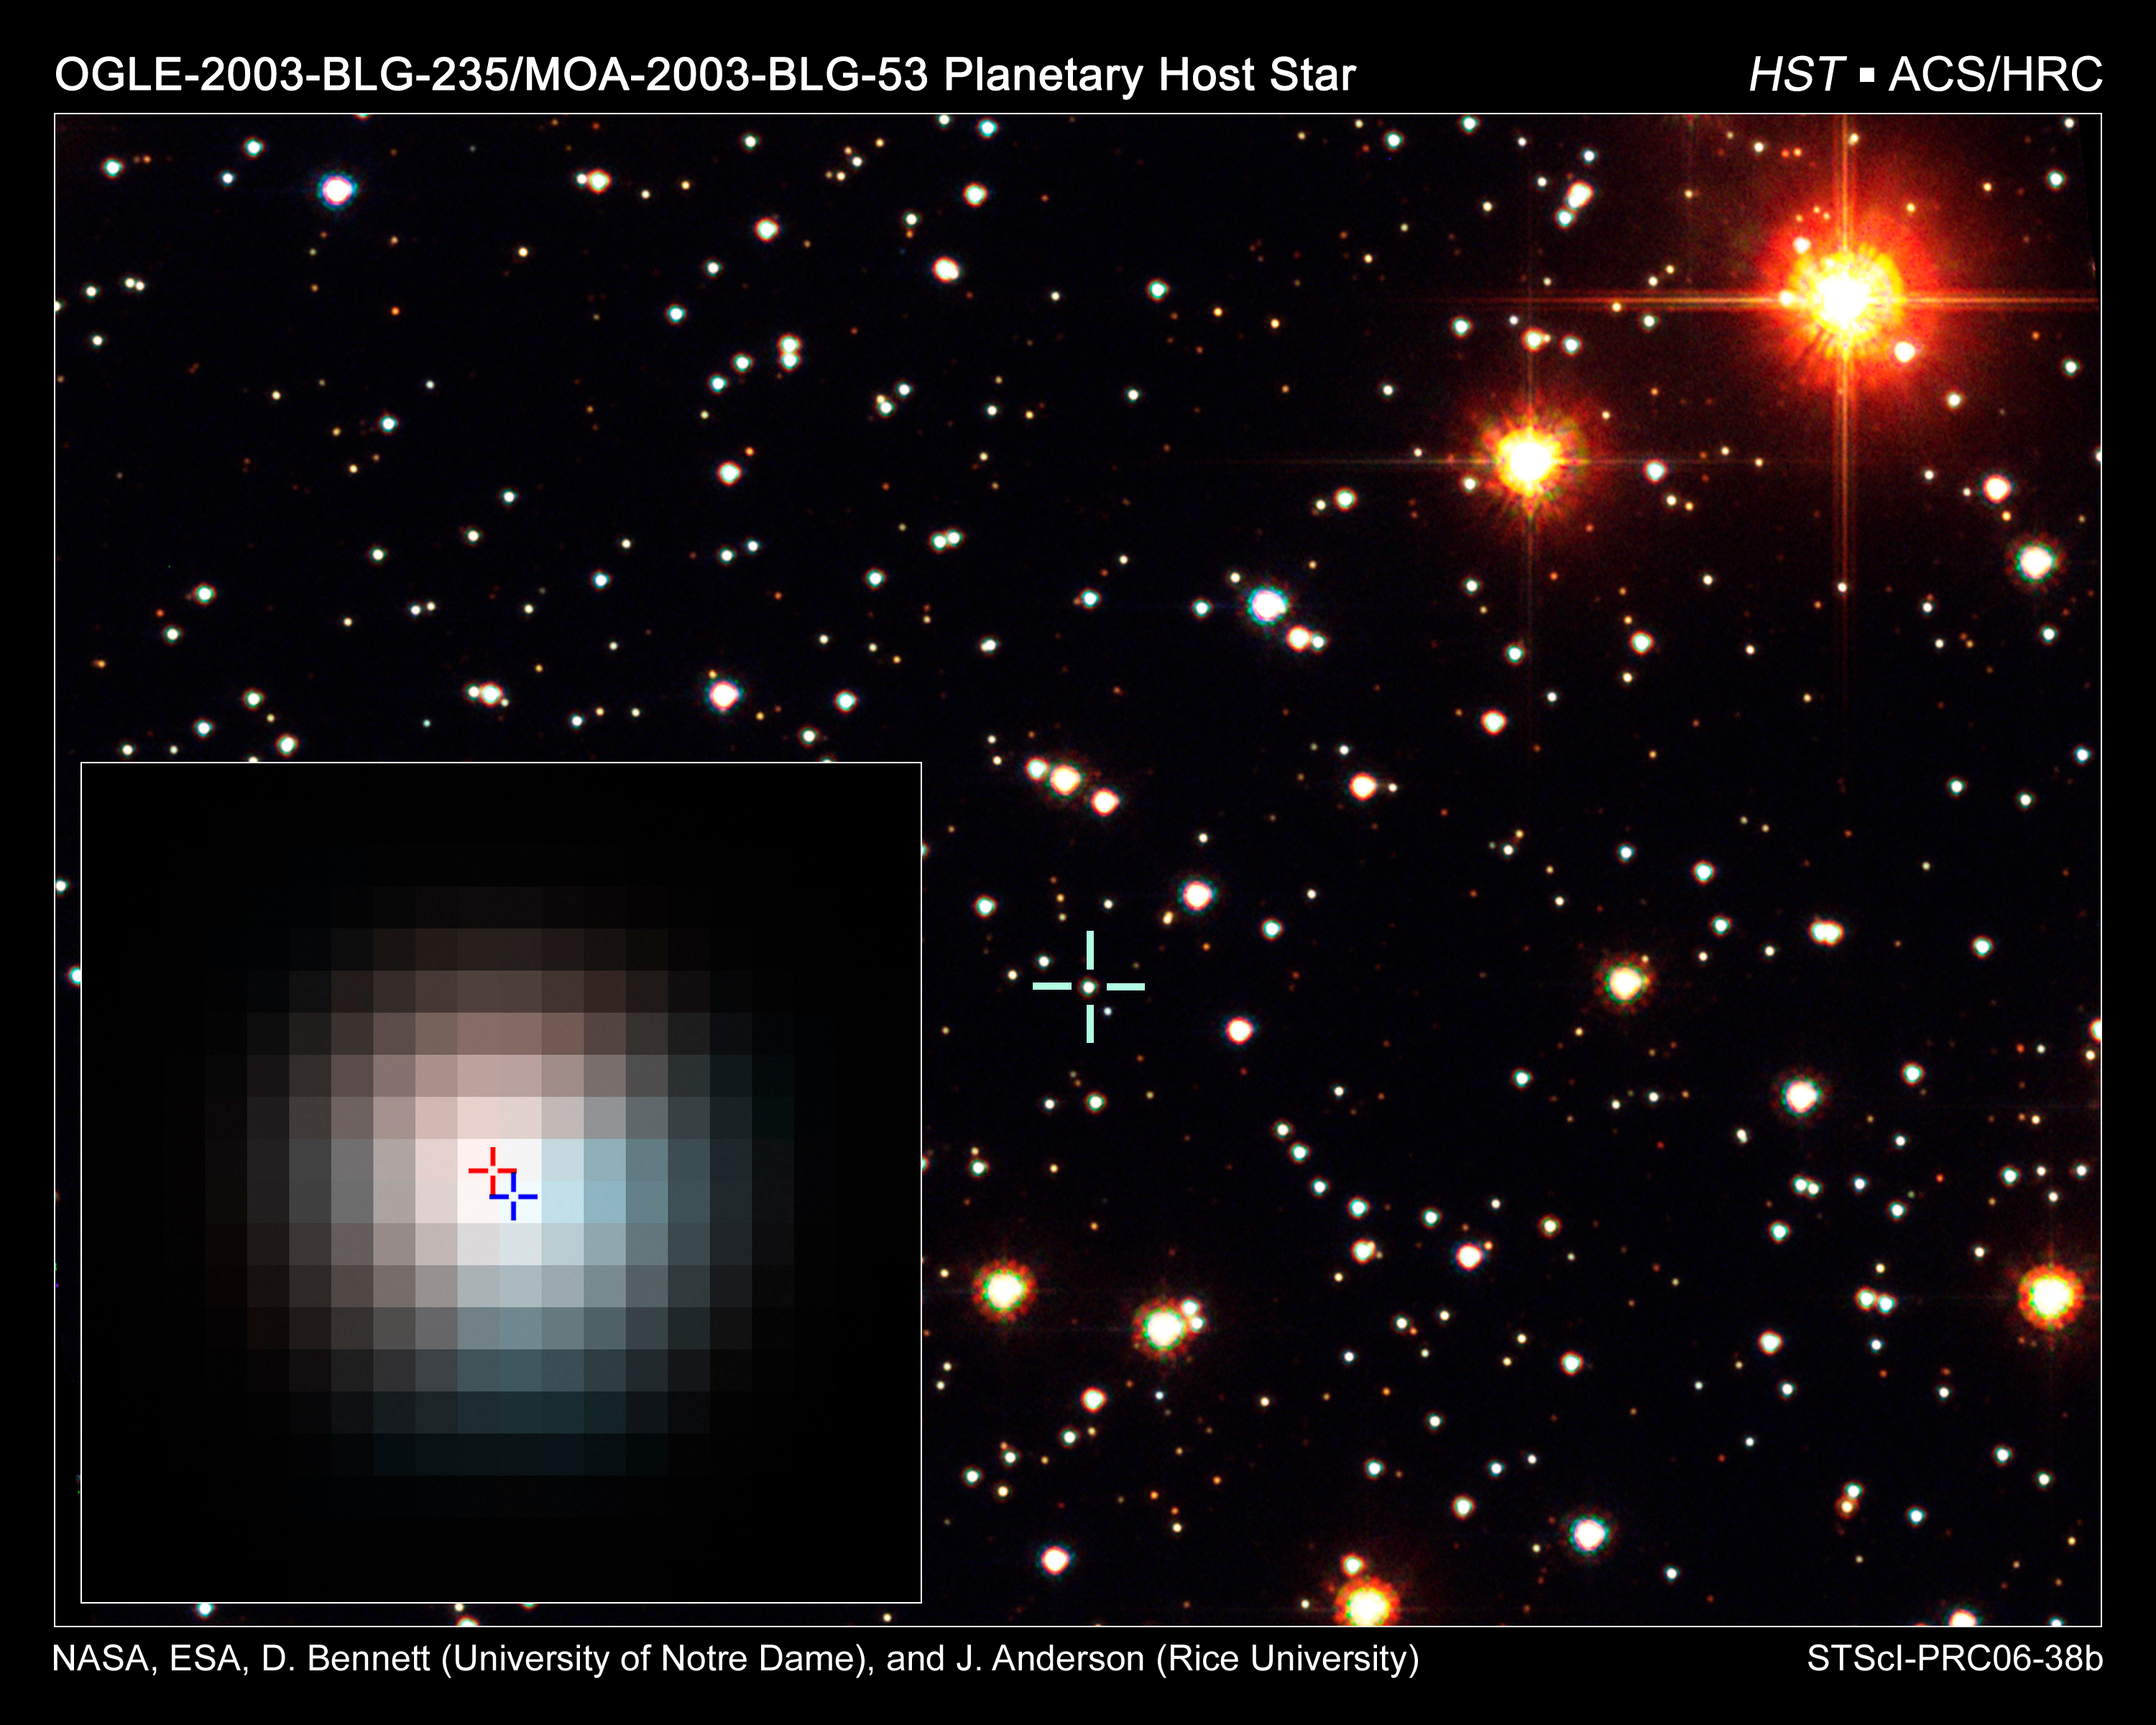

Identification of extrasolar planet host star

HST ACS/HRC B, V, I composite of microlensing target OGLE-2003-BLG-235/MOA-2003-BLG-53.

Credit: NASA, ESA, D. Bennett (University of Notre Dame), and J. Anderson (Rice University)